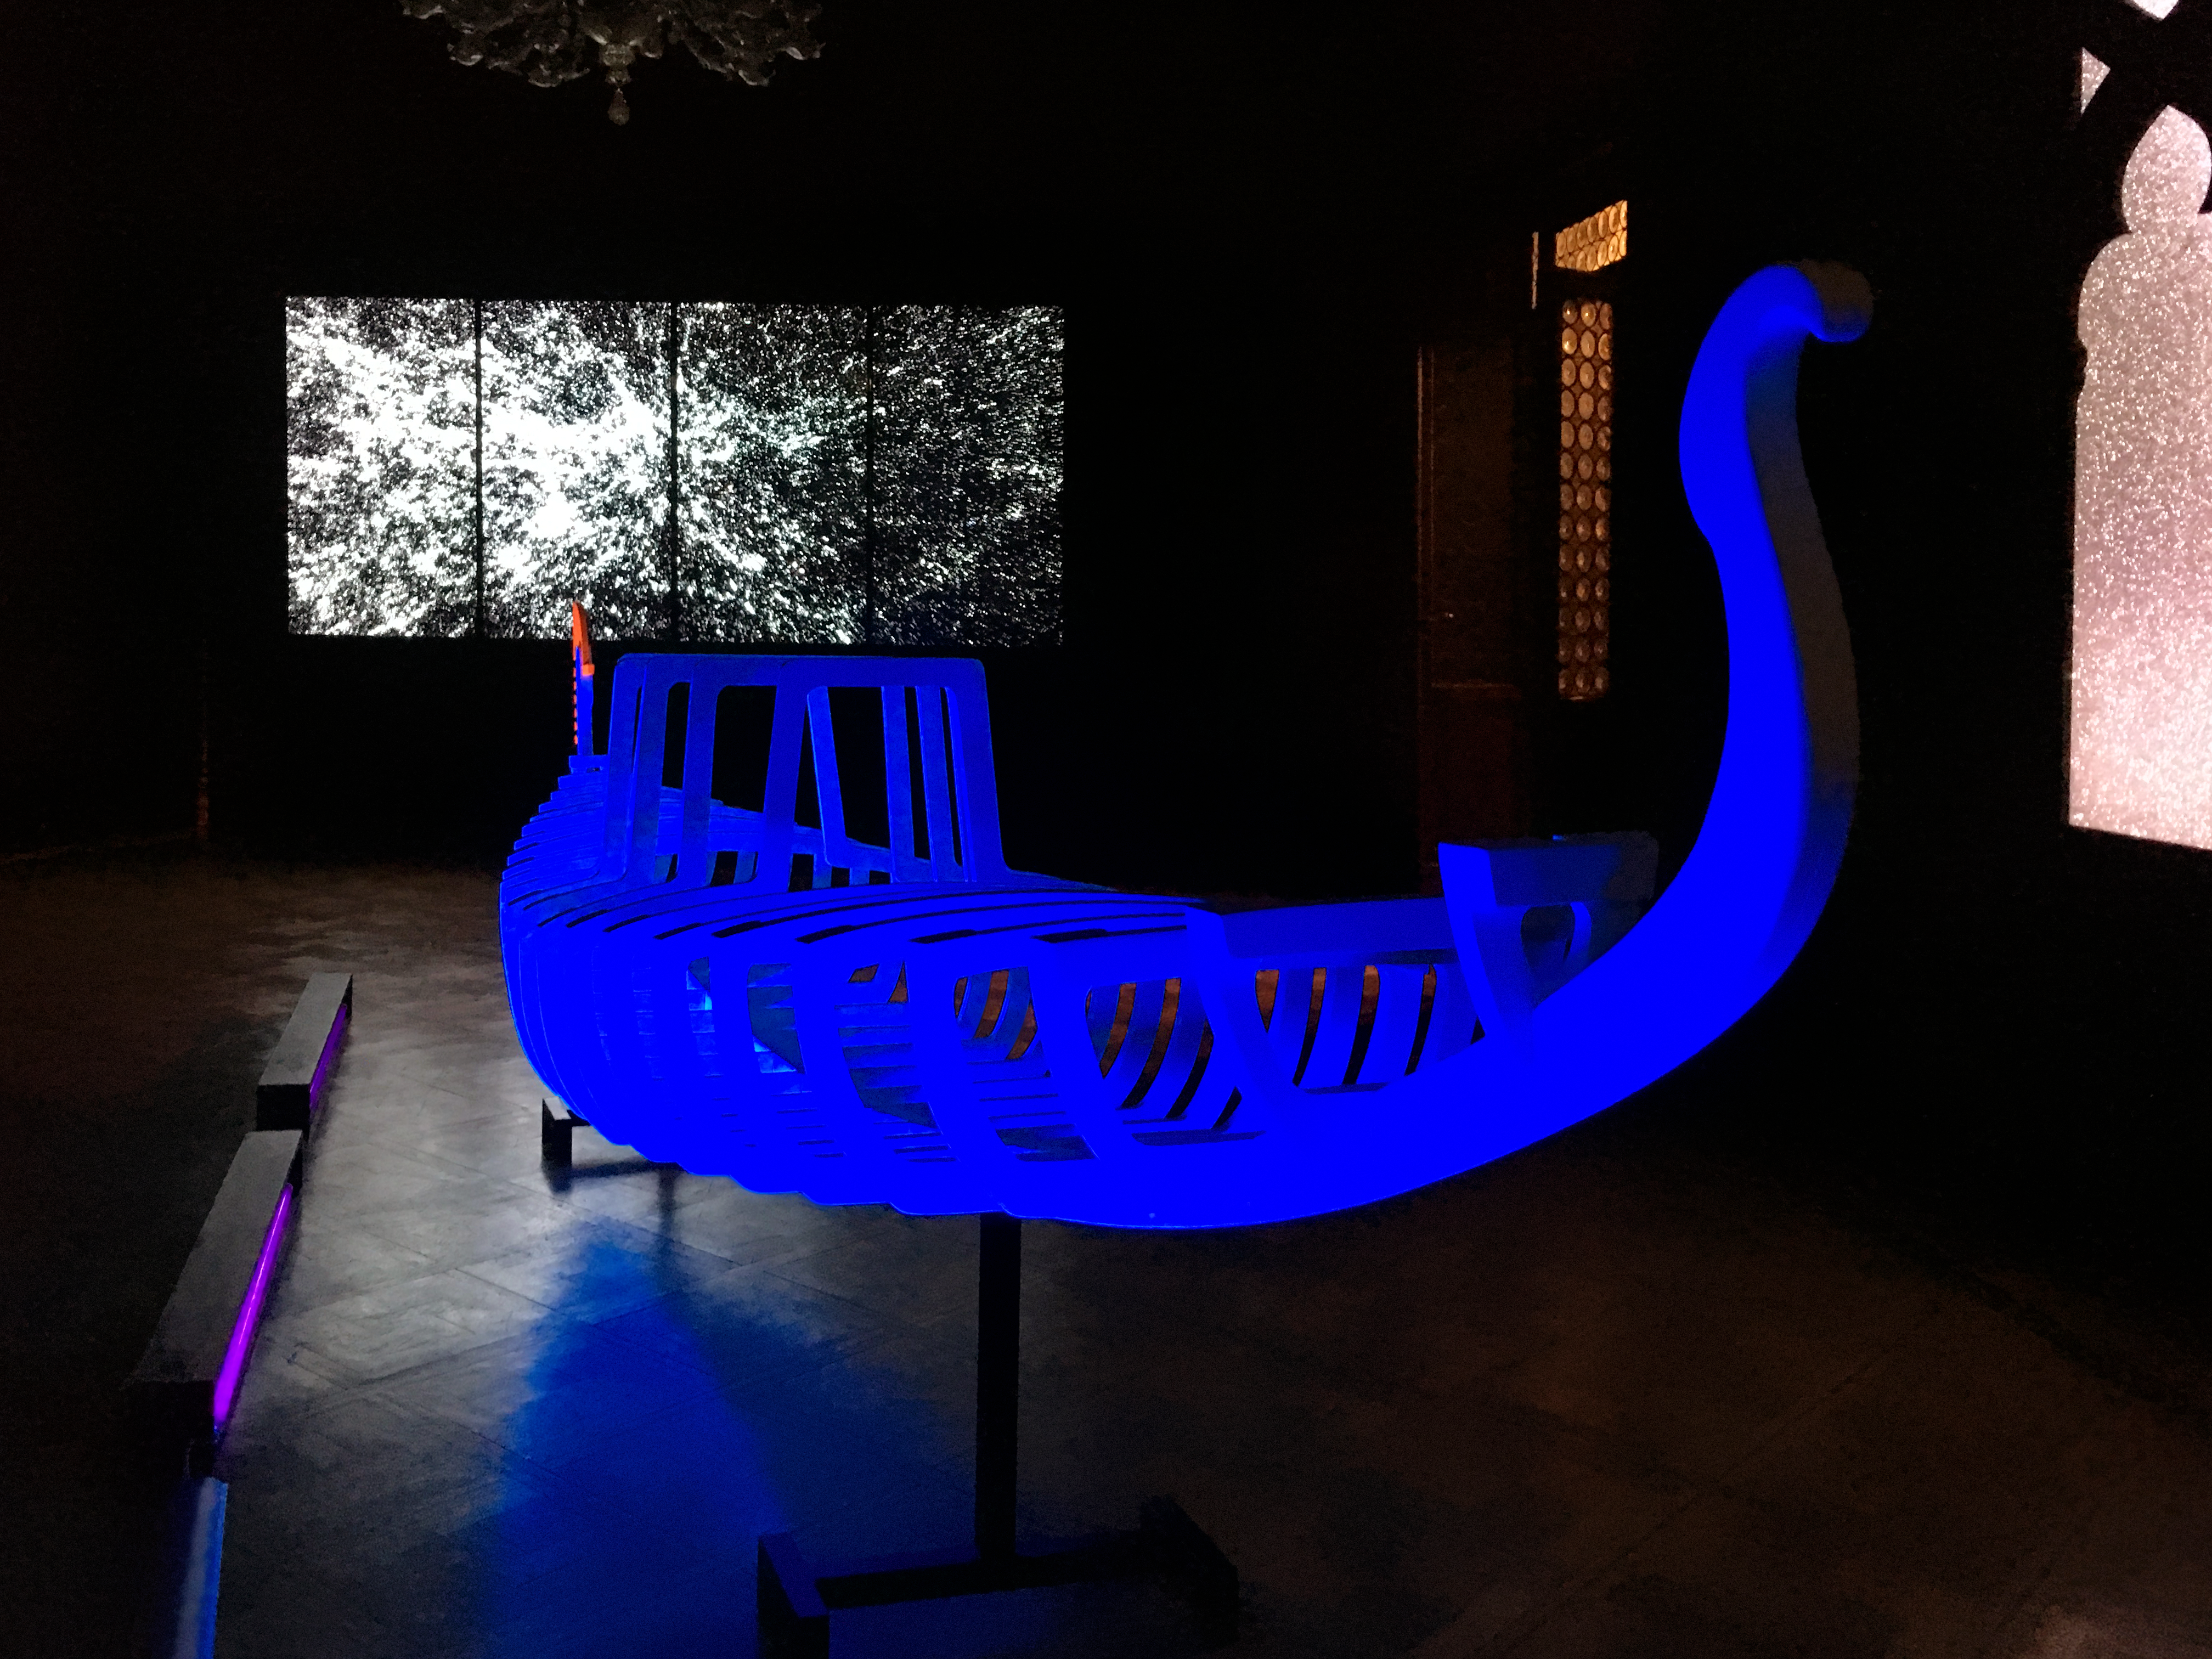

Our Place in Space — A start in Venice

The illuminated skeleton of a Venetian gondola by the artist Antonio Abbatepaolo, marks the beginning the exhibition Our Place in Space. It is facing a videowall showing a journey from Venice to the edge of the observable Universe.

Credit: ESA/Hubble, Pam Jeffries